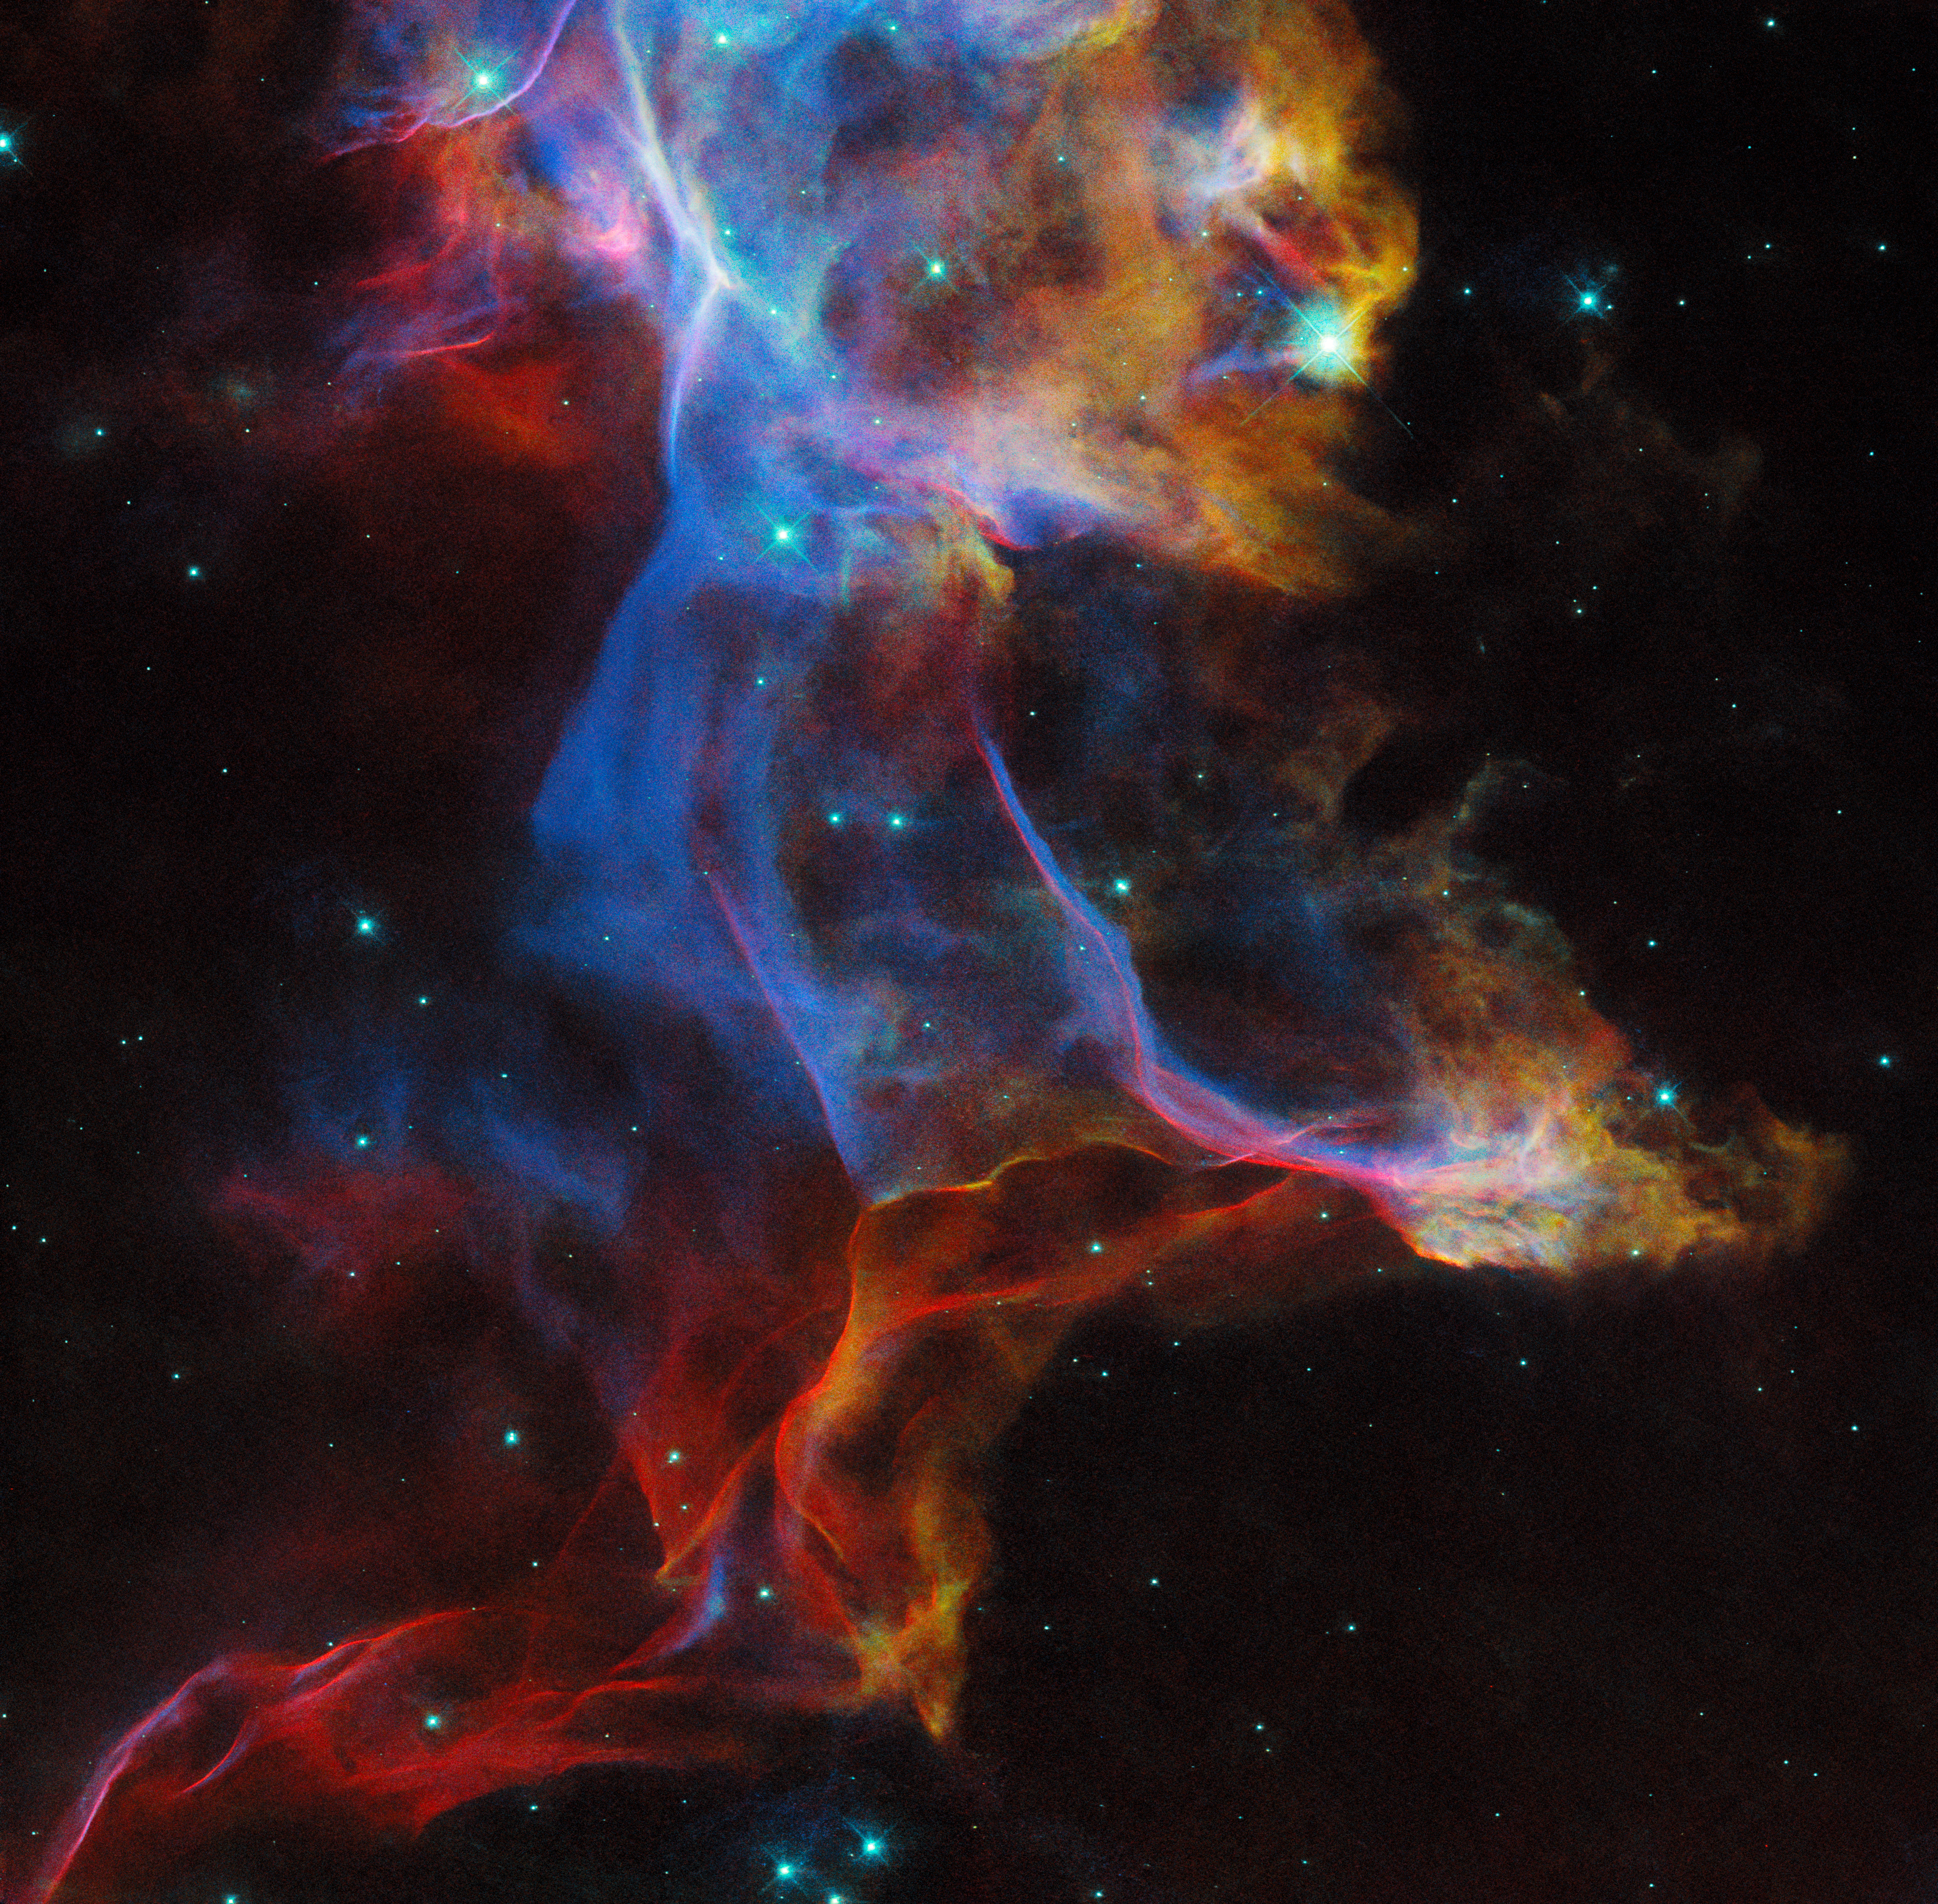

Lifting the veil

In this NASA/ESA Hubble Space Telescope Picture of the Week, Hubble has once again lifted the veil on a famous — and frequently photographed — supernova remnant: the Veil Nebula. This nebula is the remnant of a star roughly 20 times as massive as the Sun that exploded about 10 000 years ago. Situated about 2400 light-years away in the constellation Cygnus, this photogenic nebula made an appearance as the Picture of the Week previously in 2021.

This view combines images taken in three different filters by Hubble’s Wide Field Camera 3 instrument, highlighting emission from hydrogen, sulphur and oxygen atoms. This image shows just a small fraction of the Veil Nebula; if you could see the entire nebula without the aid of a telescope, it would be as wide as six full Moons placed side by side. Look in the sidebar of this page to see this image superimposed on its location in the sky, and try zooming out to compare the size of the full nebula!

Although this image captures the Veil Nebula at just a single point in time, it will help researchers understand how the supernova remnant has evolved over decades. Combining this snapshot with Hubble observations from 1994 will reveal the motion of individual knots and filaments of gas over that span of time, enhancing our understanding of this stunning nebula.

Credit: ESA/Hubble & NASA, R. Sankrit